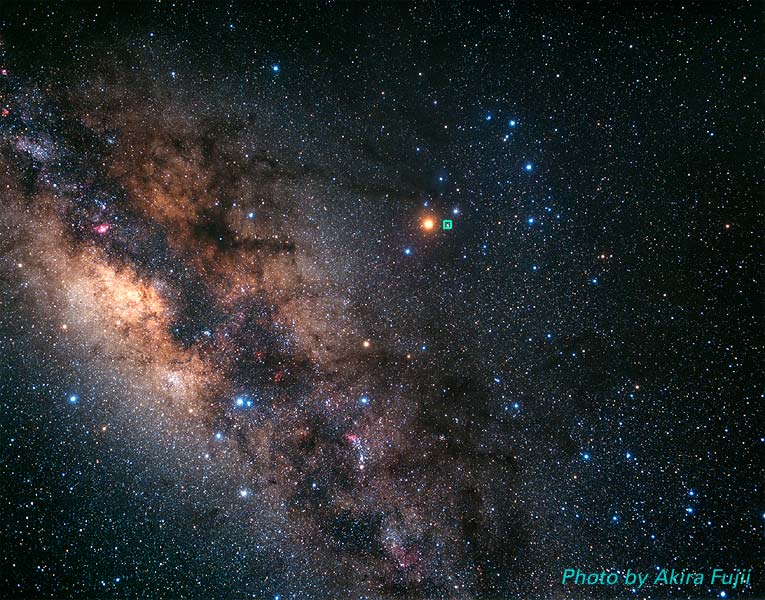

The Milky Way and Scorpius constellation (ground-based image)

This is a ground-based image showing the Milky Way and Scorpius constellation.

Credit: Akira Fujii